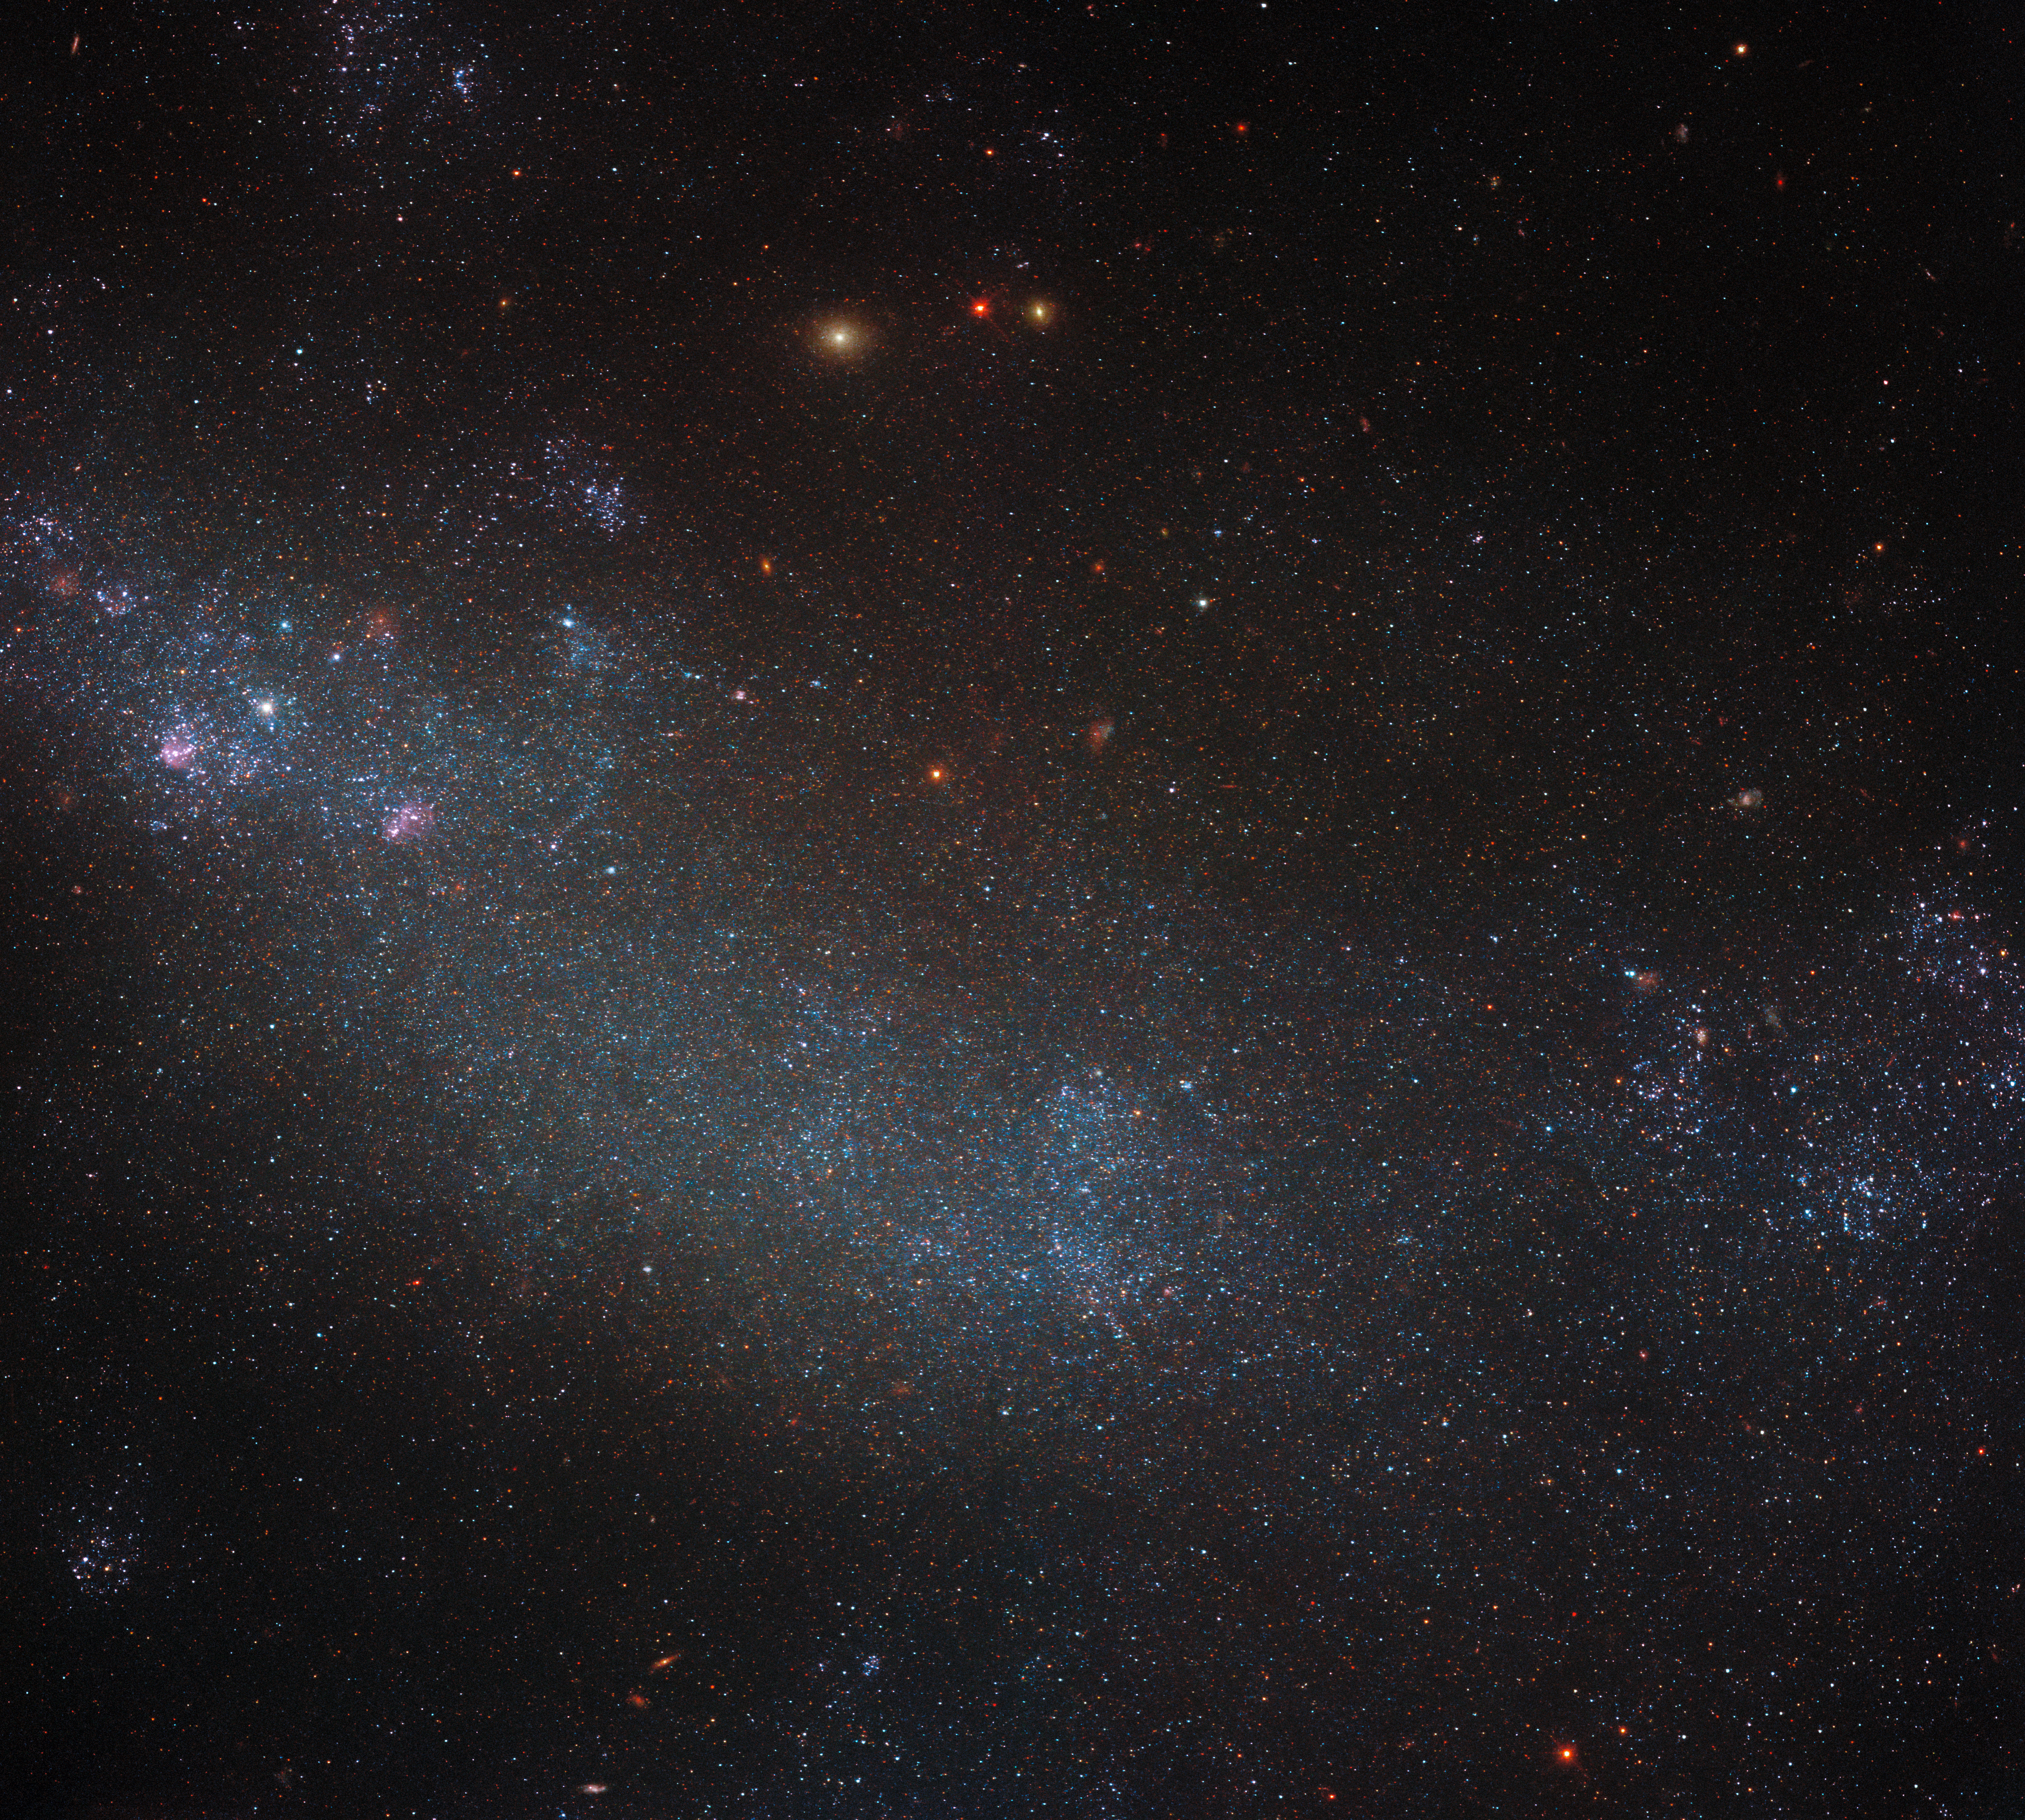

The forest for the trees, the galaxy for the stars

This image shows a densely packed field of stars, laid on top of a background of dust, gas, and light from more distant celestial objects. The stars take up so much of the field of view in this image that it is a little tricky to discern that you are in fact looking at most of a galaxy, known as ESO 245-5. This galaxy is a relatively close neighbour of the Milky Way, lying at the fairly modest distance of 15 million light-years from Earth in the constellation Phoenix.

Another reason that it is perhaps a little tricky to spot that ESO 245-5 is a galaxy is its apparent lack of structure. We frequently enjoy Hubble’s spectacular images of spiral galaxies, which are so interesting to look at in part because of their seemingly extraordinarily ordered arms of stars, gas and dust. ESO 245-5, in contrast, is classified as an IB(s)m type galaxy under the system of galaxy classification known as the De Vaucouleurs system. The IB(s)m designation specifically means that the galaxy is irregular (I), barred (B), has a slight spiral structure ((s)), and is of the Magellanic type (m).

Irregular in this context is quite intuitive: the galaxy does not appear to have a regular, ordered structure. In fact, essentially the entire view here is covered by the stars of this galaxy. The second term means that the galaxy has a barred shape at its centre: this is the dense stretch of stars that crosses through the centre of this image. The third term says that there are hints of a spiral structure, but nothing clear or definitive (hence the ‘s’ is bracketed). Finally, the last term indicates ESO 245-5’s similarity to the Magellanic clouds, the two dwarf galaxies that are close neighbours of the Milky Way.

Credit: ESA/Hubble & NASA, M. Messa